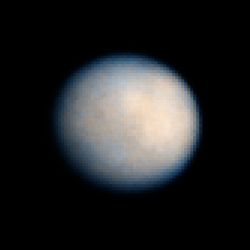

Ceres: 24 January 2004 03:27 UT

Observations of Ceres, the largest known asteroid, have revealed that the object may be a "mini planet," sharing many characteristics of the rocky, terrestrial planets like Earth.

Credit: NASA, ESA, J. Parker (Southwest Research Institute), P. Thomas (Cornell University), L. McFadden (University of Maryland, College Park), and M. Mutchler and Z. Levay (STScI)